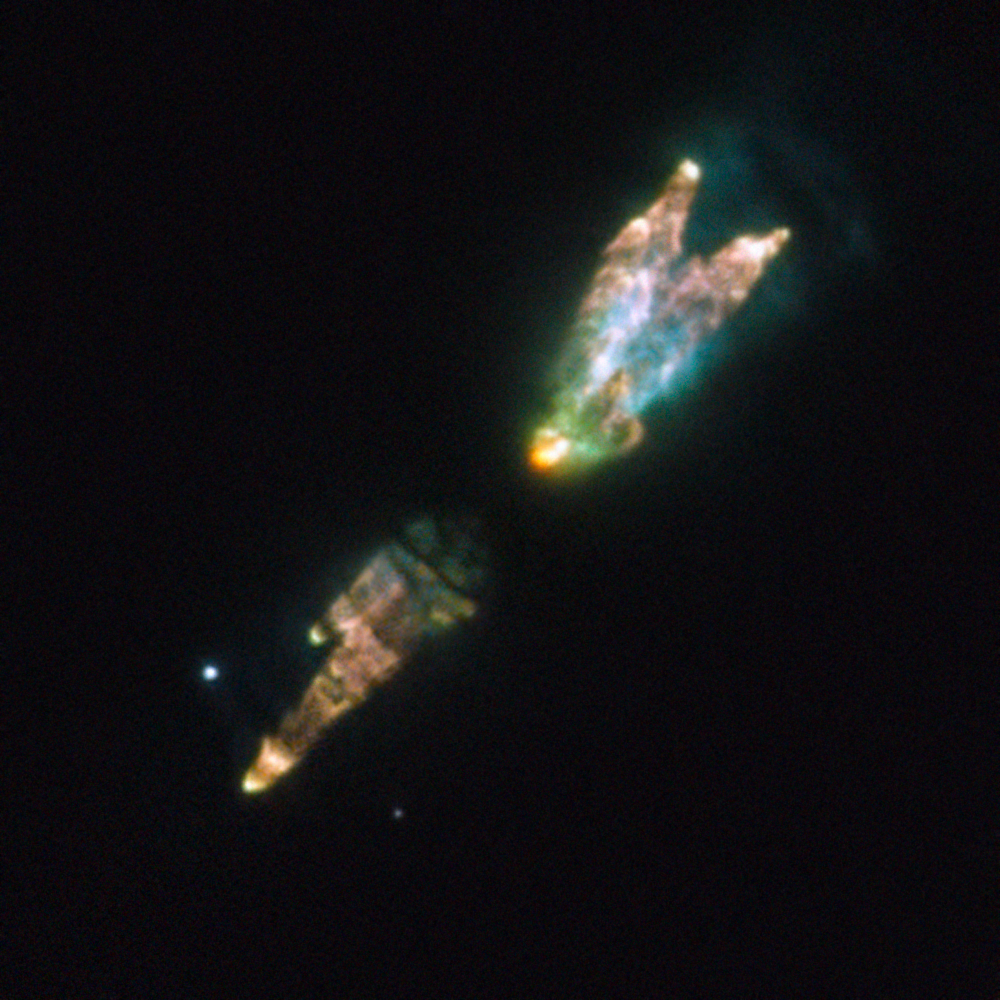

A dying star’s toxic legacy

The strange and irregular bundle of jets and clouds in this curious image from the NASA/ESA Hubble Space Telescope is the result of a burst of activity late in the life of a star. As its core runs out of nuclear fuel, the star’s unstable outer layers are puffing out a toxic concoction of gases including carbon monoxide and hydrogen cyanide.

The Westbrook Nebula — also known as PK166-06, CRL 618 and AFGL 618 — is a protoplanetary nebula, an opaque, dark and relatively short-lived cloud of gas that is ejected by a star as it runs out of nuclear fuel. As the star hidden deep in the centre of the nebula evolves further it will turn into a hot white dwarf and the gas around it will become a glowing planetary nebula, before eventually dispersing. Because this is a relatively brief stage in the evolution process of stars, only a few hundred protoplanetary nebulae are known in the Milky Way.

Protoplanetary nebulae are cool, and so emit little visible light. This makes them very faint, posing challenges to scientists who wish to study them. What this picture shows, therefore, is a composite image representing the different tricks that the astronomers used to unravel what is going on within this strange nebula. The picture includes exposures in visible light which shows light reflected from the cloud of gas, combined with other exposures in the near-infrared part of the spectrum, showing us the dim glow, invisible to human eyes, that is coming from different elements deep in the cloud itself.

One of the nebula’s names, AFGL 618, comes from its discovery by a precursor to the Hubble Space Telescope: the letters stand for Air Force Geophysics Laboratory. This US research organisation launched a series of suborbital rockets with infrared telescopes on board in the 1970s, cataloguing hundreds of objects that were impossible or difficult to observe from the ground. In some respects, these were a proof of concept for later orbital infrared astronomical facilities including Hubble and ESA’s Herschel Space Observatory.

This image was prepared from many separate exposures taken using Hubble’s newest camera, the Wide Field Camera 3. Exposures through a green filter (F547M) were coloured blue, those through a yellow/orange filter (F606W) were coloured green and exposures through a filter that isolates the glow from ionised nitrogen (F658N) have been coloured red. Images through filters that capture the glows from singly and doubly ionised sulphur (F673N and F953N) are also shown in red. The total exposure times were about nine minutes through each filter and the field of view is approximately 20 arcseconds across.

Credit: ESA/Hubble & NASA